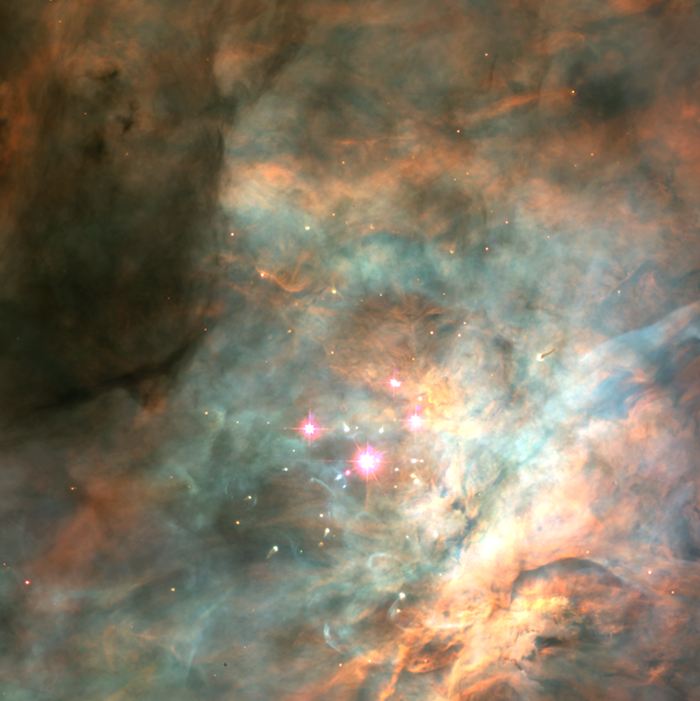

Trapezium Cluster in the Orion Nebula

The brown dwarfs are too dim to be seen in a visible-light image taken by the Hubble telescope's Wide Field and Planetary Camera 2. This view also doesn't show the assemblage of infant stars seen in the near-infrared image. That's because the young stars are embedded in dense clouds of dust and gas. The Hubble telescope's near-infrared camera, the Near Infrared Camera and Multi-Object Spectrometer, penetrated those clouds to capture a view of those objects.

Credit: C.R. O'Dell and S.K. Wong (Rice University) and NASA/ESA